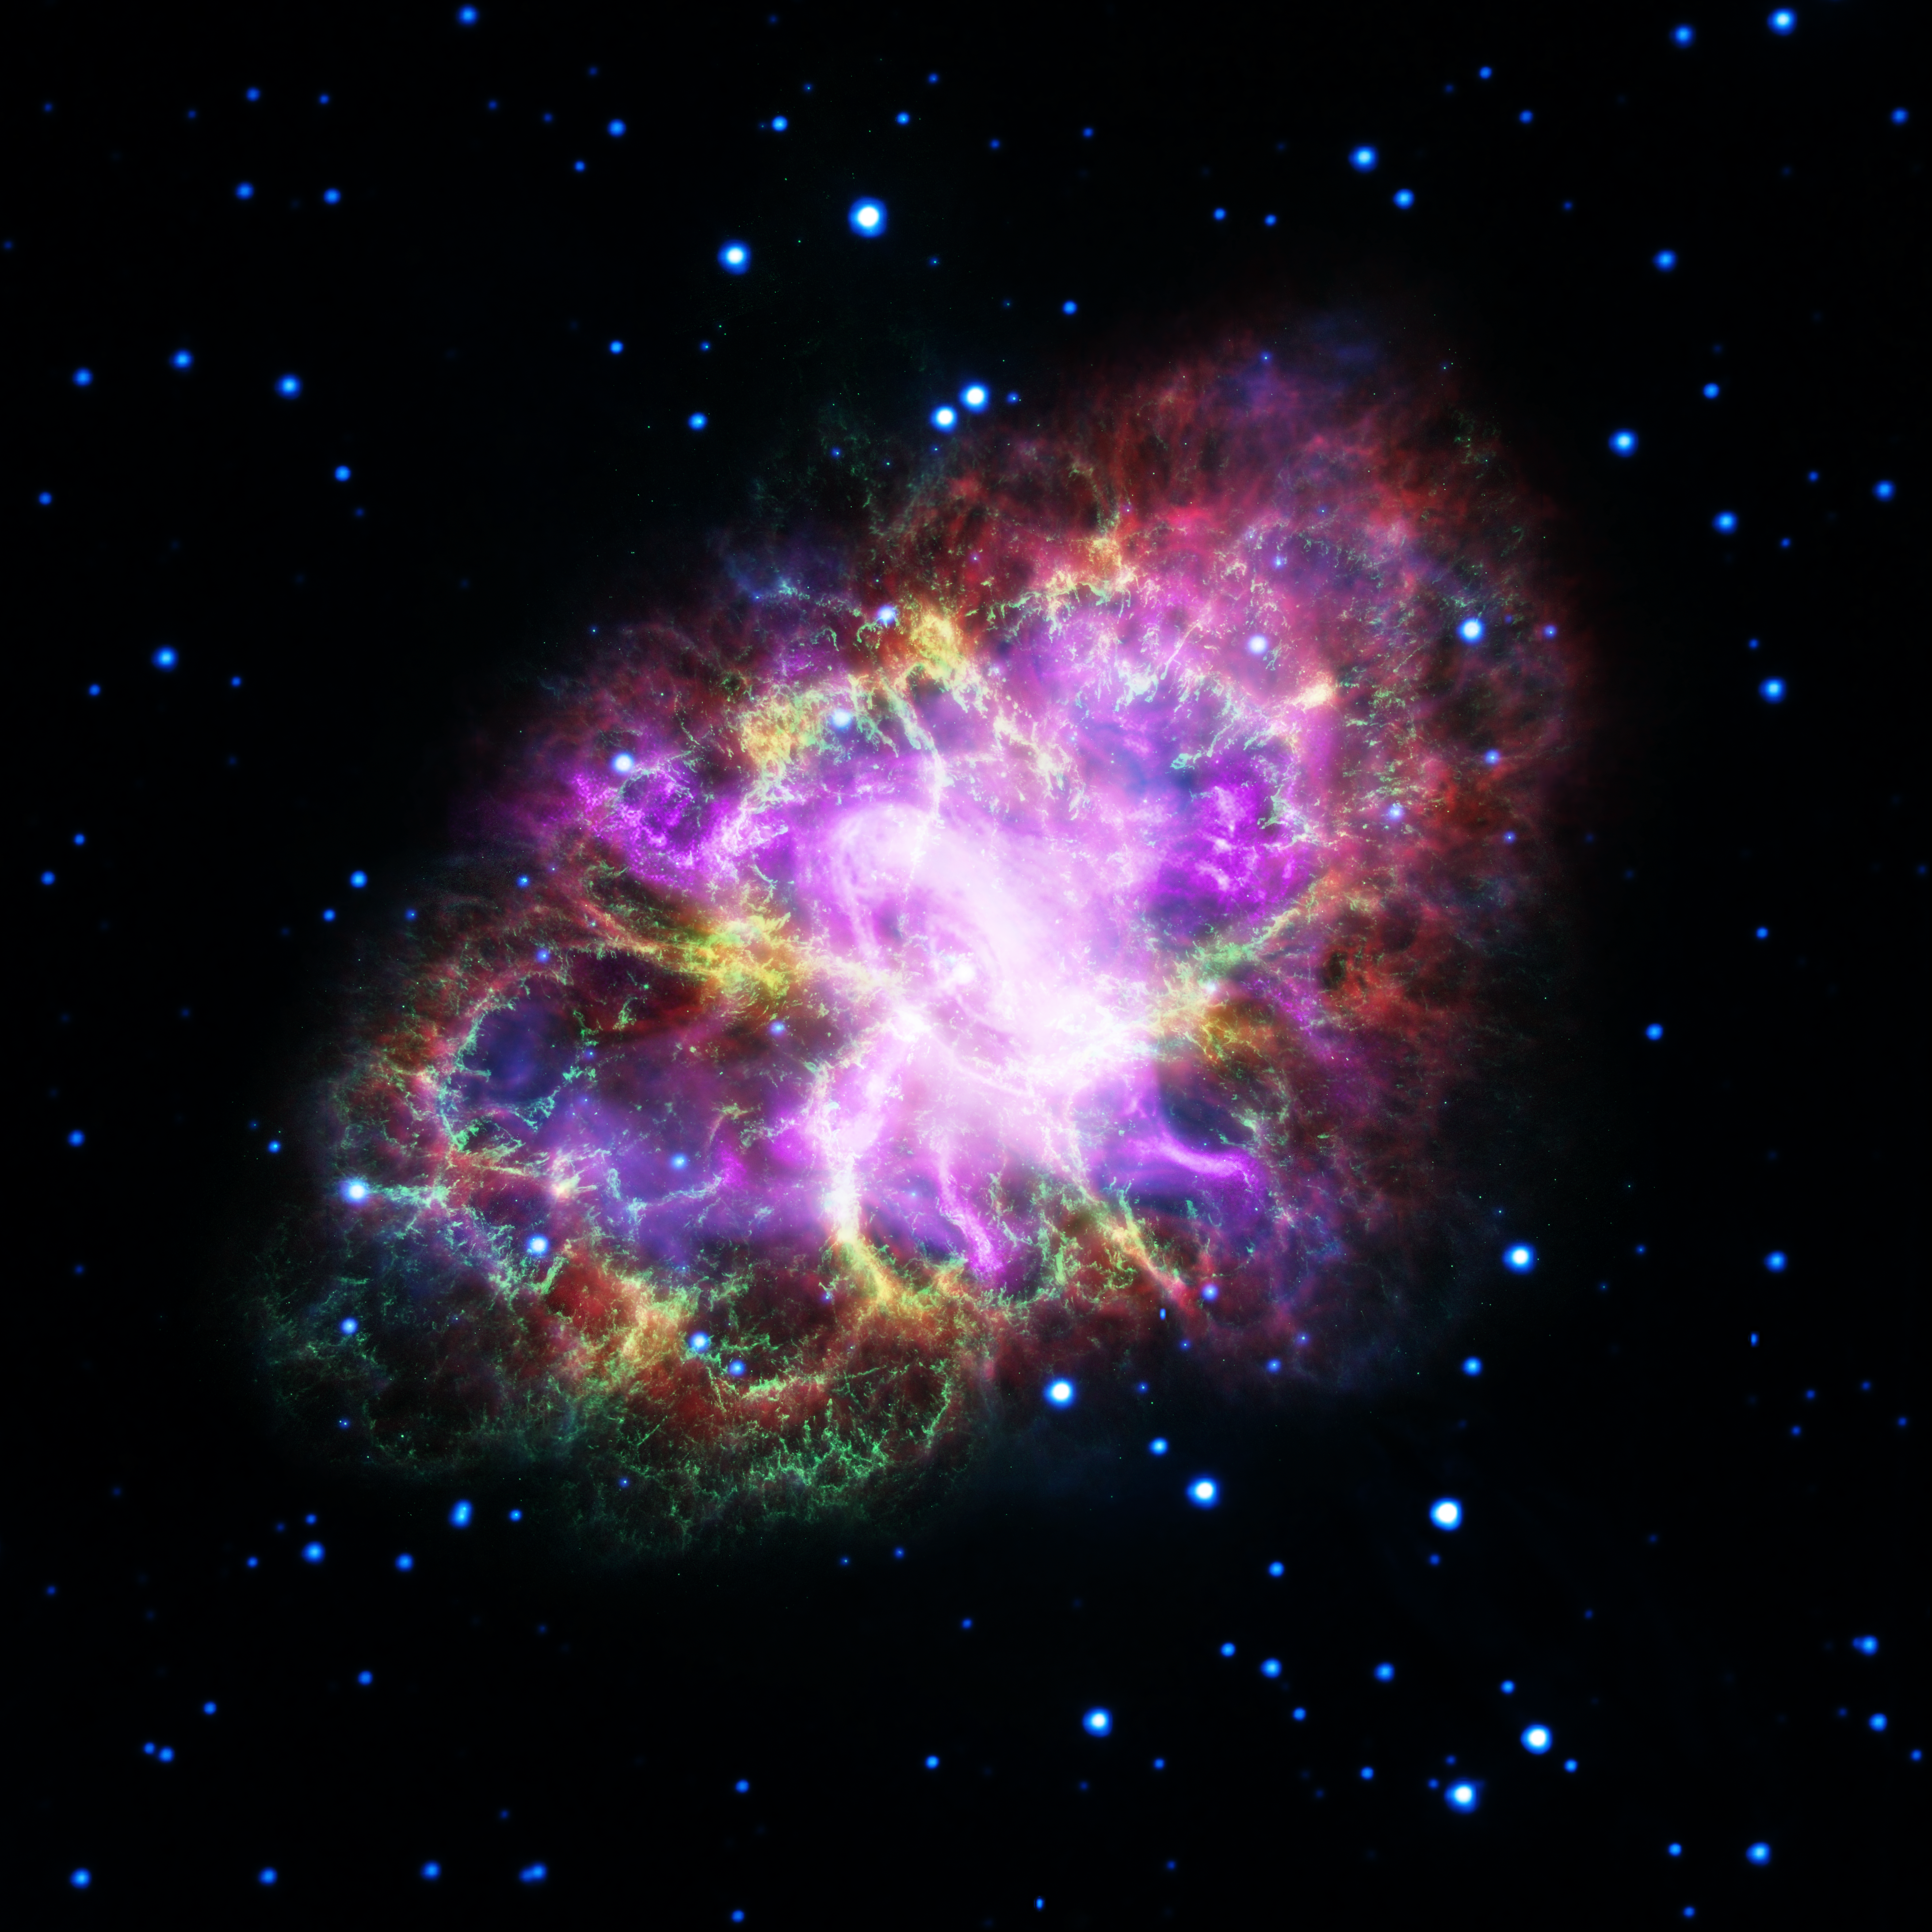

Crab on LCD

This captivating new image shows the Crab Nebula in bright neon colours. The unusual image was produced by combining data from telescopes spanning nearly the entire electromagnetic spectrum, from radio waves to X-rays. The Karl G. Jansky Very Large Array (VLA) provided information about the nebula gathered in the radio regime (coloured in red). NASA’s Spitzer Space Telescope took images in the infrared (yellow). The NASA/ESA Hubble Space Telescope provided the images made in optical wavelengths (coloured in green). ESA’s XMM-Newton telescope observed the Crab Nebula in the ultraviolet (blue) and NASA’s Chandra X-ray Observatory provided the data for X-ray radiation (purple).

The Crab Nebula, located 6500 light-years from Earth in the constellation of Taurus (The Bull), is the result of a supernova explosion which was observed by Chinese and other astronomers in 1054. At its centre is a pulsar: a super-dense neutron star, spinning once every 33 milliseconds, shooting out rotating lighthouse-like beams of radio waves and visible light.

Surrounding the pulsar lies a mix of material; some of it was originally expelled from the star before it went supernova, and the rest was ejected during the explosion itself. Fast-moving winds of particles fly off from the neutron star, energising the dust and gas around it. These different layers and intricacies of the nebula can be observed in all of the different wavelengths of light.

Credit: NASA, ESA, G. Dubner (IAFE, CONICET-University of Buenos Aires) et al.; A. Loll et al.; T. Temim et al.; F. Seward et al.; VLA/NRAO/AUI/NSF; Chandra/CXC; Spitzer/JPL-Caltech; XMM-Newton/ESA; and Hubble/STScI